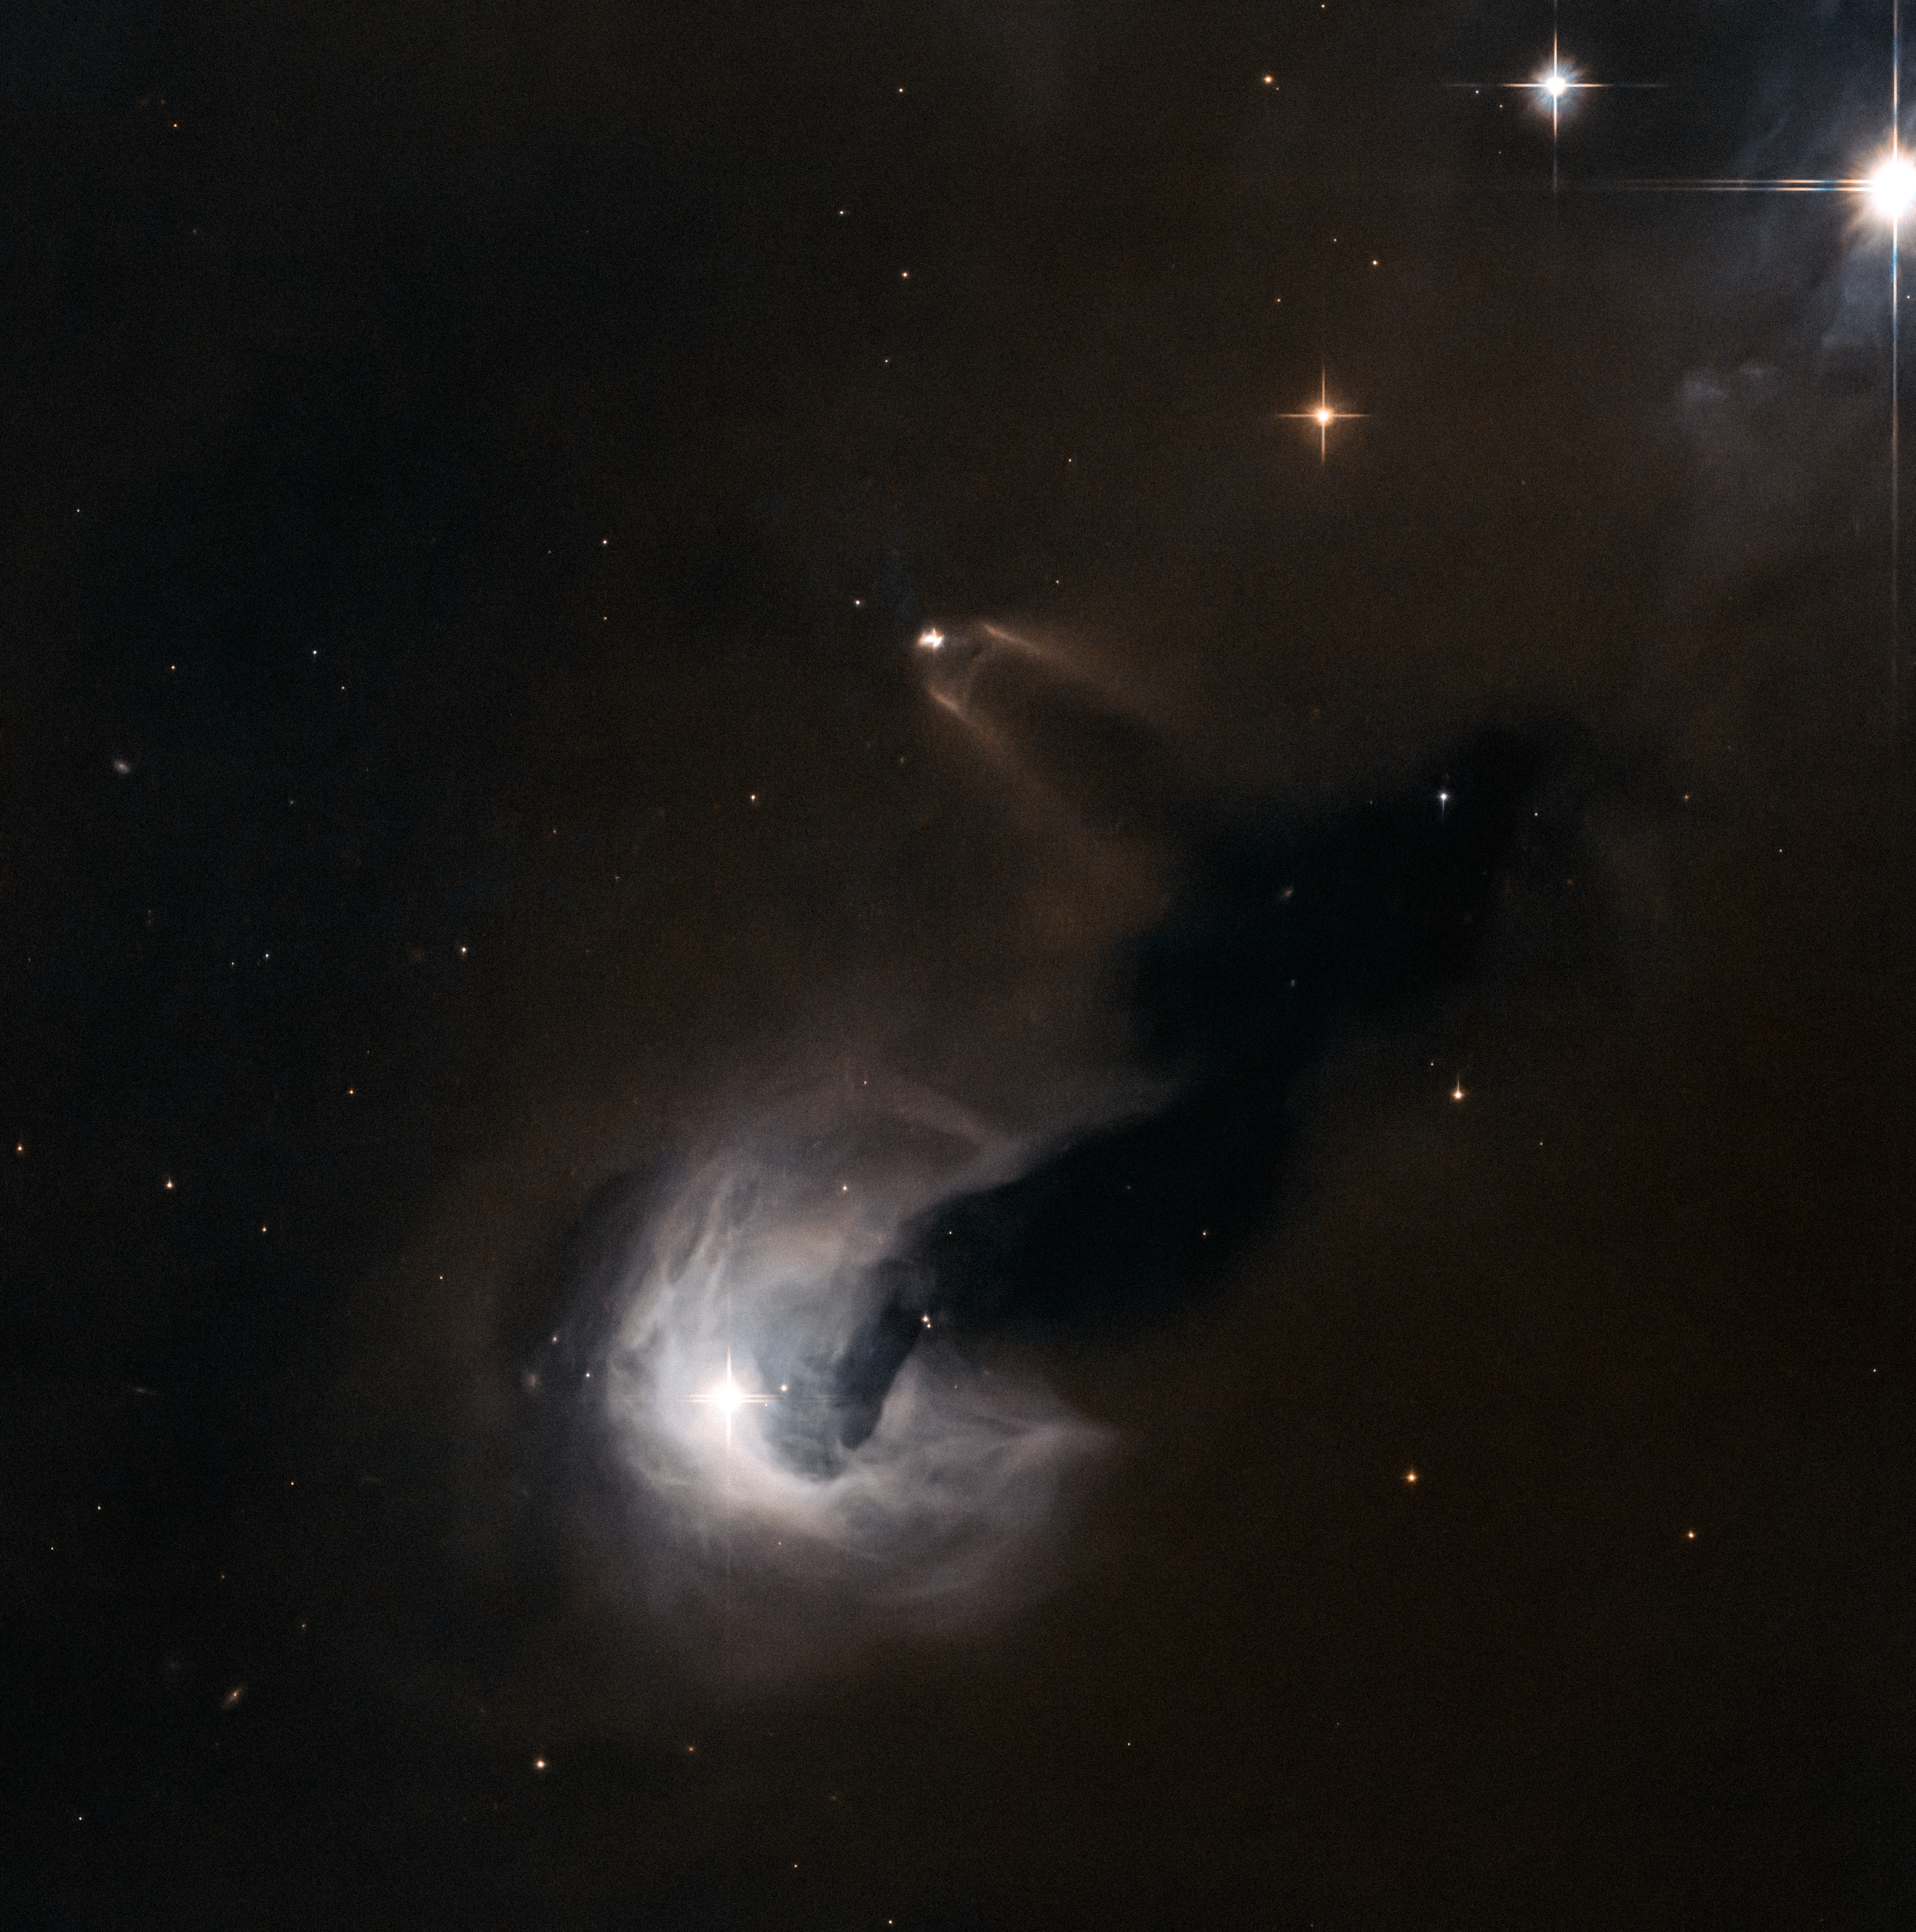

Light and dark

This new NASA/ESA Hubble Space Telescope image shows a variety of intriguing cosmic phenomena.

Surrounded by bright stars, towards the upper middle of the frame we see a small young stellar object (YSO) known as SSTC2D J033038.2+303212. Located in the constellation of Perseus, this star is in the early stages of its life and is still forming into a fully grown star. In this view from Hubble’s Advanced Camera for Surveys (ACS) it appears to have a murky chimney of material emanating outwards and downwards, framed by bright bursts of gas flowing from the star itself. This fledgling star is actually surrounded by a bright disc of material swirling around it as it forms — a disc that we see edge-on from our perspective.

However, this small bright speck is dwarfed by its cosmic neighbour towards the bottom of the frame, a clump of bright, wispy gas swirling around as it appears to spew dark material out into space. The bright cloud is a reflection nebula known as [B77] 63, a cloud of interstellar gas that is reflecting light from the stars embedded within it. There are actually a number of bright stars within [B77] 63, most notably the emission-line star LkHA 326, and its very near neighbour LZK 18.

These stars are lighting up the surrounding gas and sculpting it into the wispy shape seen in this image. However, the most dramatic part of the image seems to be a dark stream of smoke piling outwards from [B77] 63 and its stars — a dark nebula called Dobashi 4173. Dark nebulae are incredibly dense clouds of pitch-dark material that obscure the patches of sky behind them, seemingly creating great rips and eerily empty chunks of sky. The stars speckled on top of this extreme blackness actually lie between us and Dobashi 4173.

Credit: ESA/Hubble & NASA